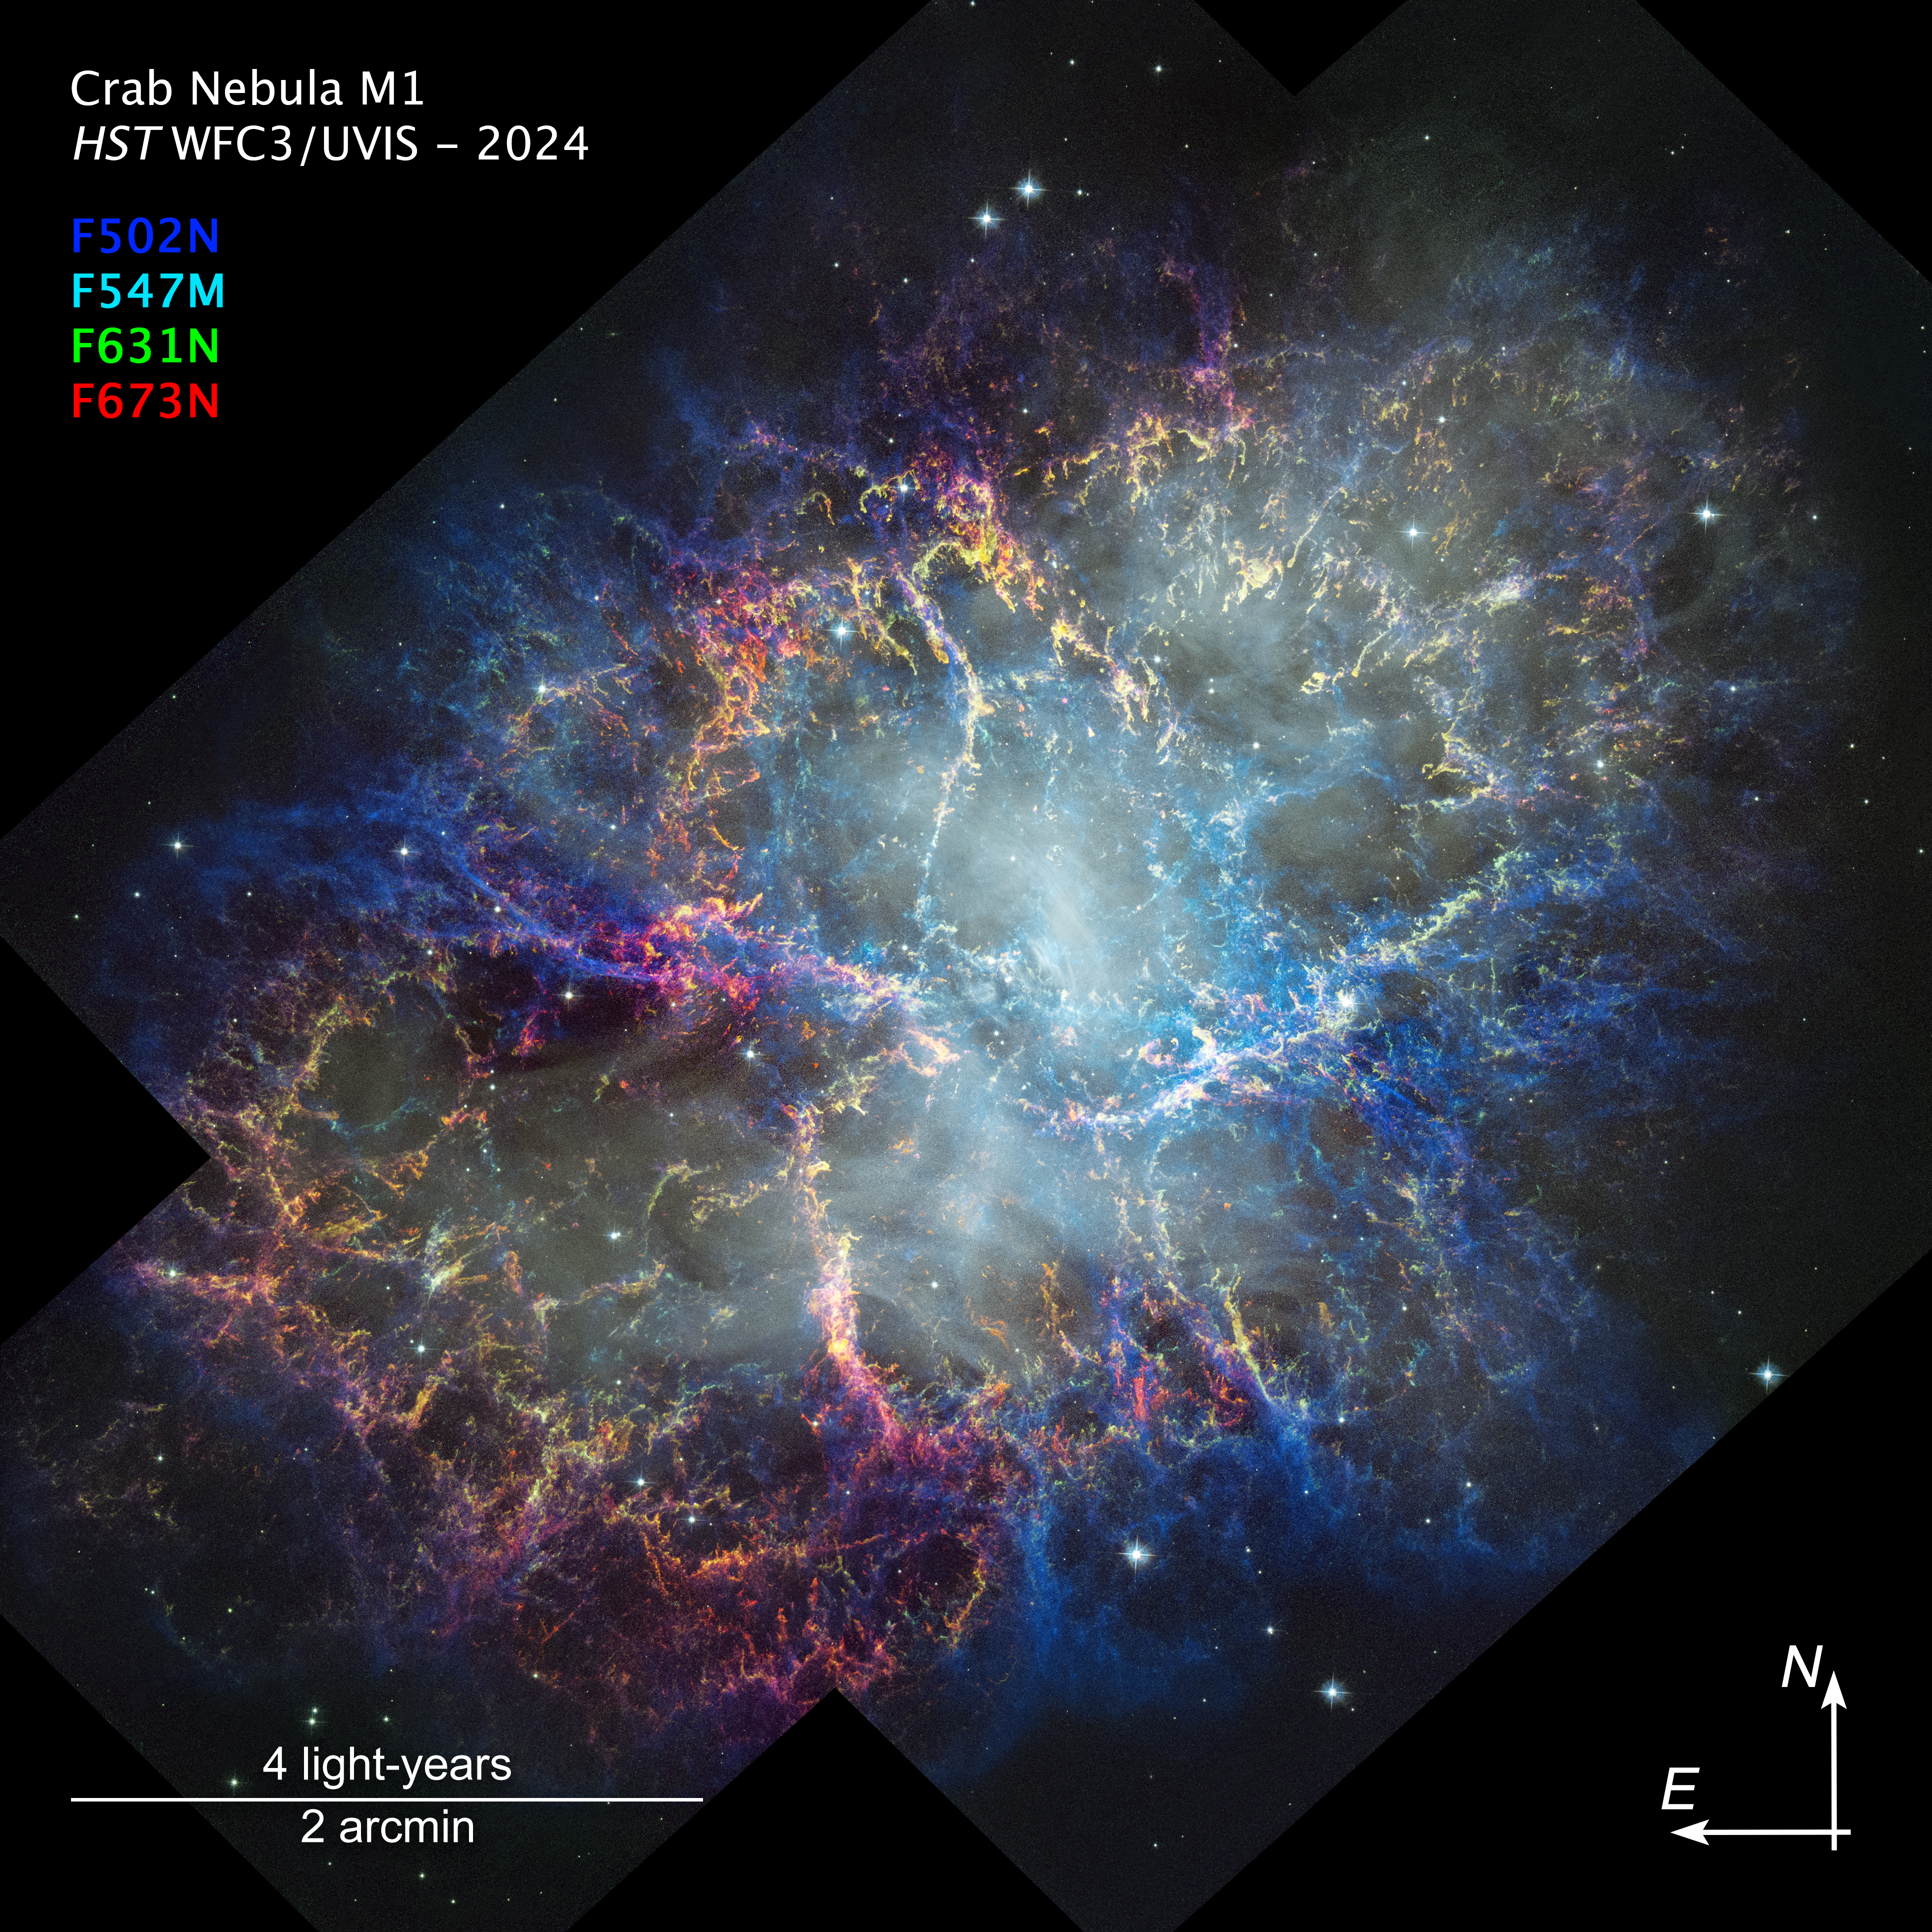

Crab Nebula (2024 Hubble image, annotated)

The NASA/ESA Hubble Space Telescope has captured the intricate detail of the Crab Nebula with its Wide Field Camera 3. The colours in the image trace Hubble’s detection of oxygen and sulfur gases in the nebula at varying densities and energies. The blue areas are the hottest and lowest density. While there is not a lot of green in the image, showing dense neutral oxygen, there is quite a lot of yellow, which appears where green and the red of energized sulfur are near to each other and similarly bright.

The white haze in the central region is synchrotron radiation, which is produced by interaction between the magnetic field of the central pulsar and the Crab’s nebulous material. This emission heats the surrounding filaments, causing them to glow. Synchrotron radiation is also powering the nebula’s ongoing expansion, distinguishing the Crab from other well-known young supernova remnants. The Crab Nebula is the closest supernova remnant of this kind to Earth, making it invaluable to astronomers using Hubble to study its evolution in unparalleled detail.

Credit: NASA, ESA, STScI, W. Blair (JHU). Image Processing: J. DePasquale (STScI)